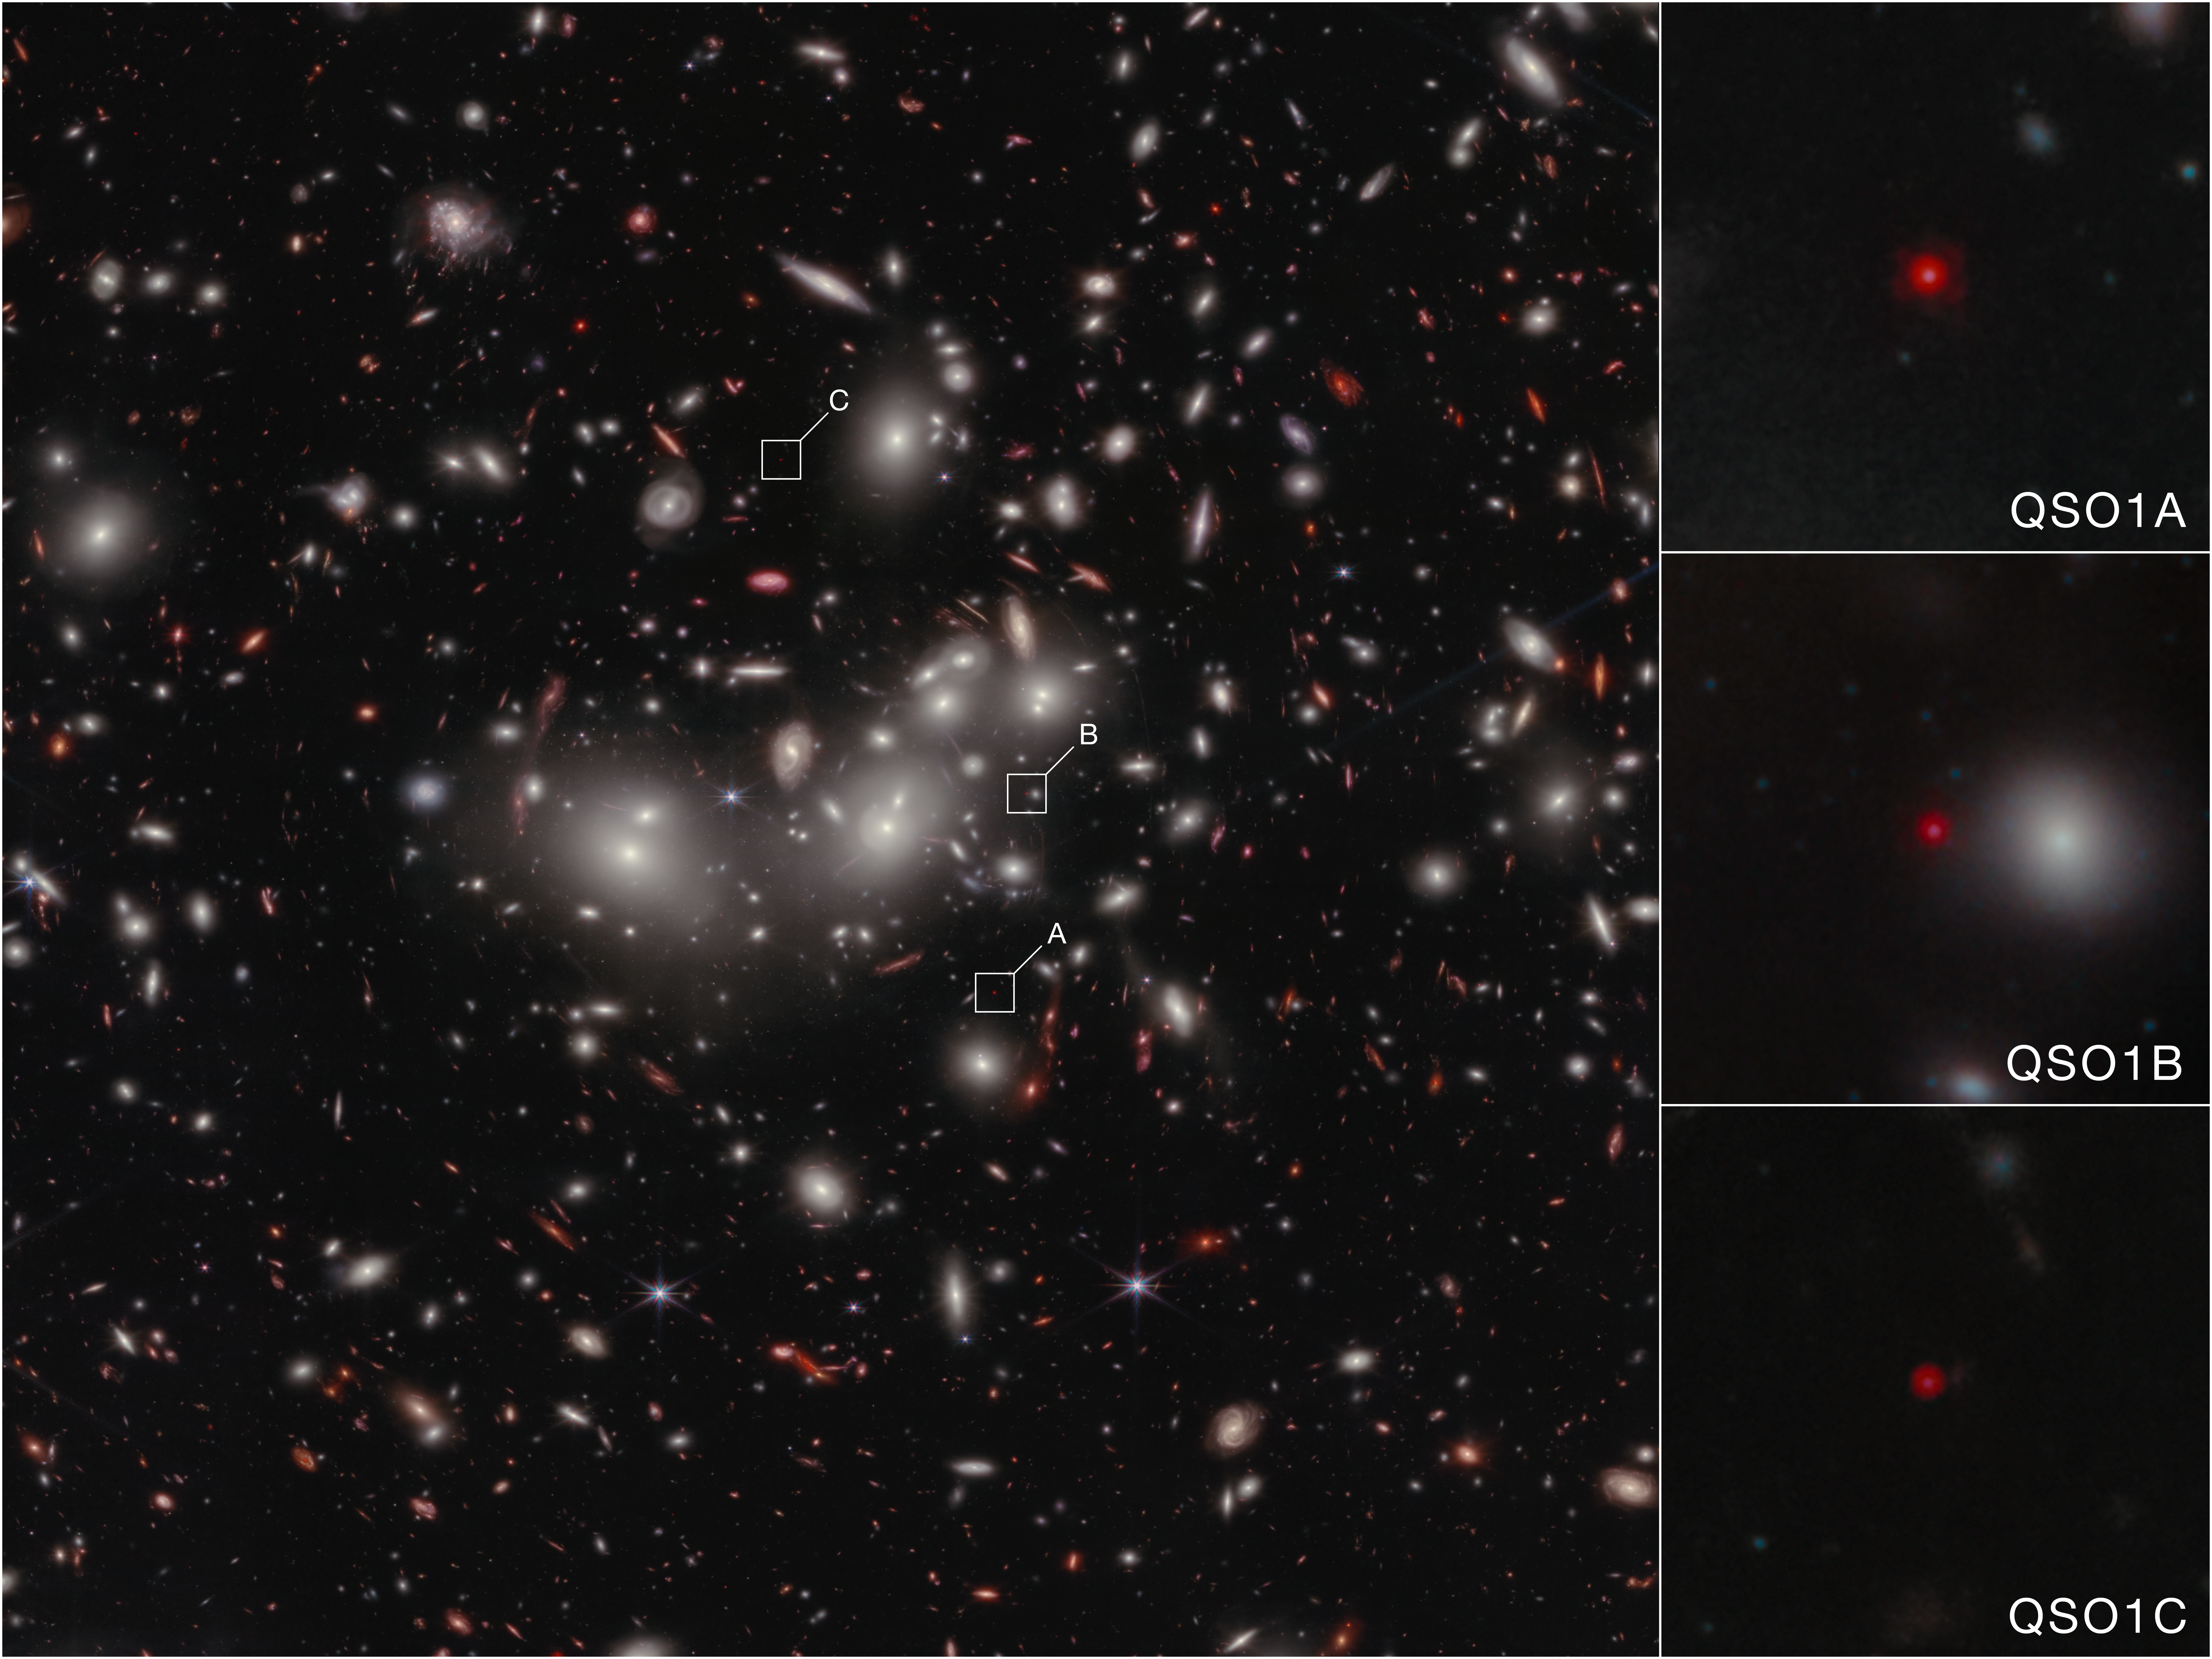

Little Red Dot Abell2744-QSO1 (NIRCam Image)

This is an image from NIRCam (Near Infrared Camera) on Webb that shows Abell2744-QSO1, magnified and triply imaged by galaxy cluster Abell 2744.

Abell2744-QSO1 (QSO1) is a prototypical Little Red Dot, one of the first of hundreds of tiny glowing flecks of infrared light that Webb has found speckling the early Universe. QSO1 is roughly 1,300 light-years across and with a cosmological redshift (z) of 7, its light dates back to just 700 million years after the Big Bang, when the Universe was only 5% of its current age.

QSO1 is ideal for study because it is gravitationally lensed, both magnified and triply imaged by Abell 2744, the intervening mega-cluster of galaxies that warps its surrounding space-time.

Detailed study of the brightest of the three lensed images, QSO1A (upper right), shows that the object consists of a central supermassive black hole 50 million times the mass of the Sun, surrounded by a cloud of hydrogen and helium gas with very small amounts of heavier elements like oxygen. Unlike supermassive black holes in nearby galaxies, which make up only a tiny fraction of their host galaxy’s total mass, QSO1’s black hole contains twice as much mass as the galactic material surrounding it.

Credit: NASA, ESA, CSA, L. Furtak (Ben-Gurion University), R. Maiolino (Cambridge), F. D'Eugenio (Cambridge), I. Juodžbalis (Cambridge), H. Übler (MPE), C. Marconcini (University of Florence). Image processing: A. Pagan